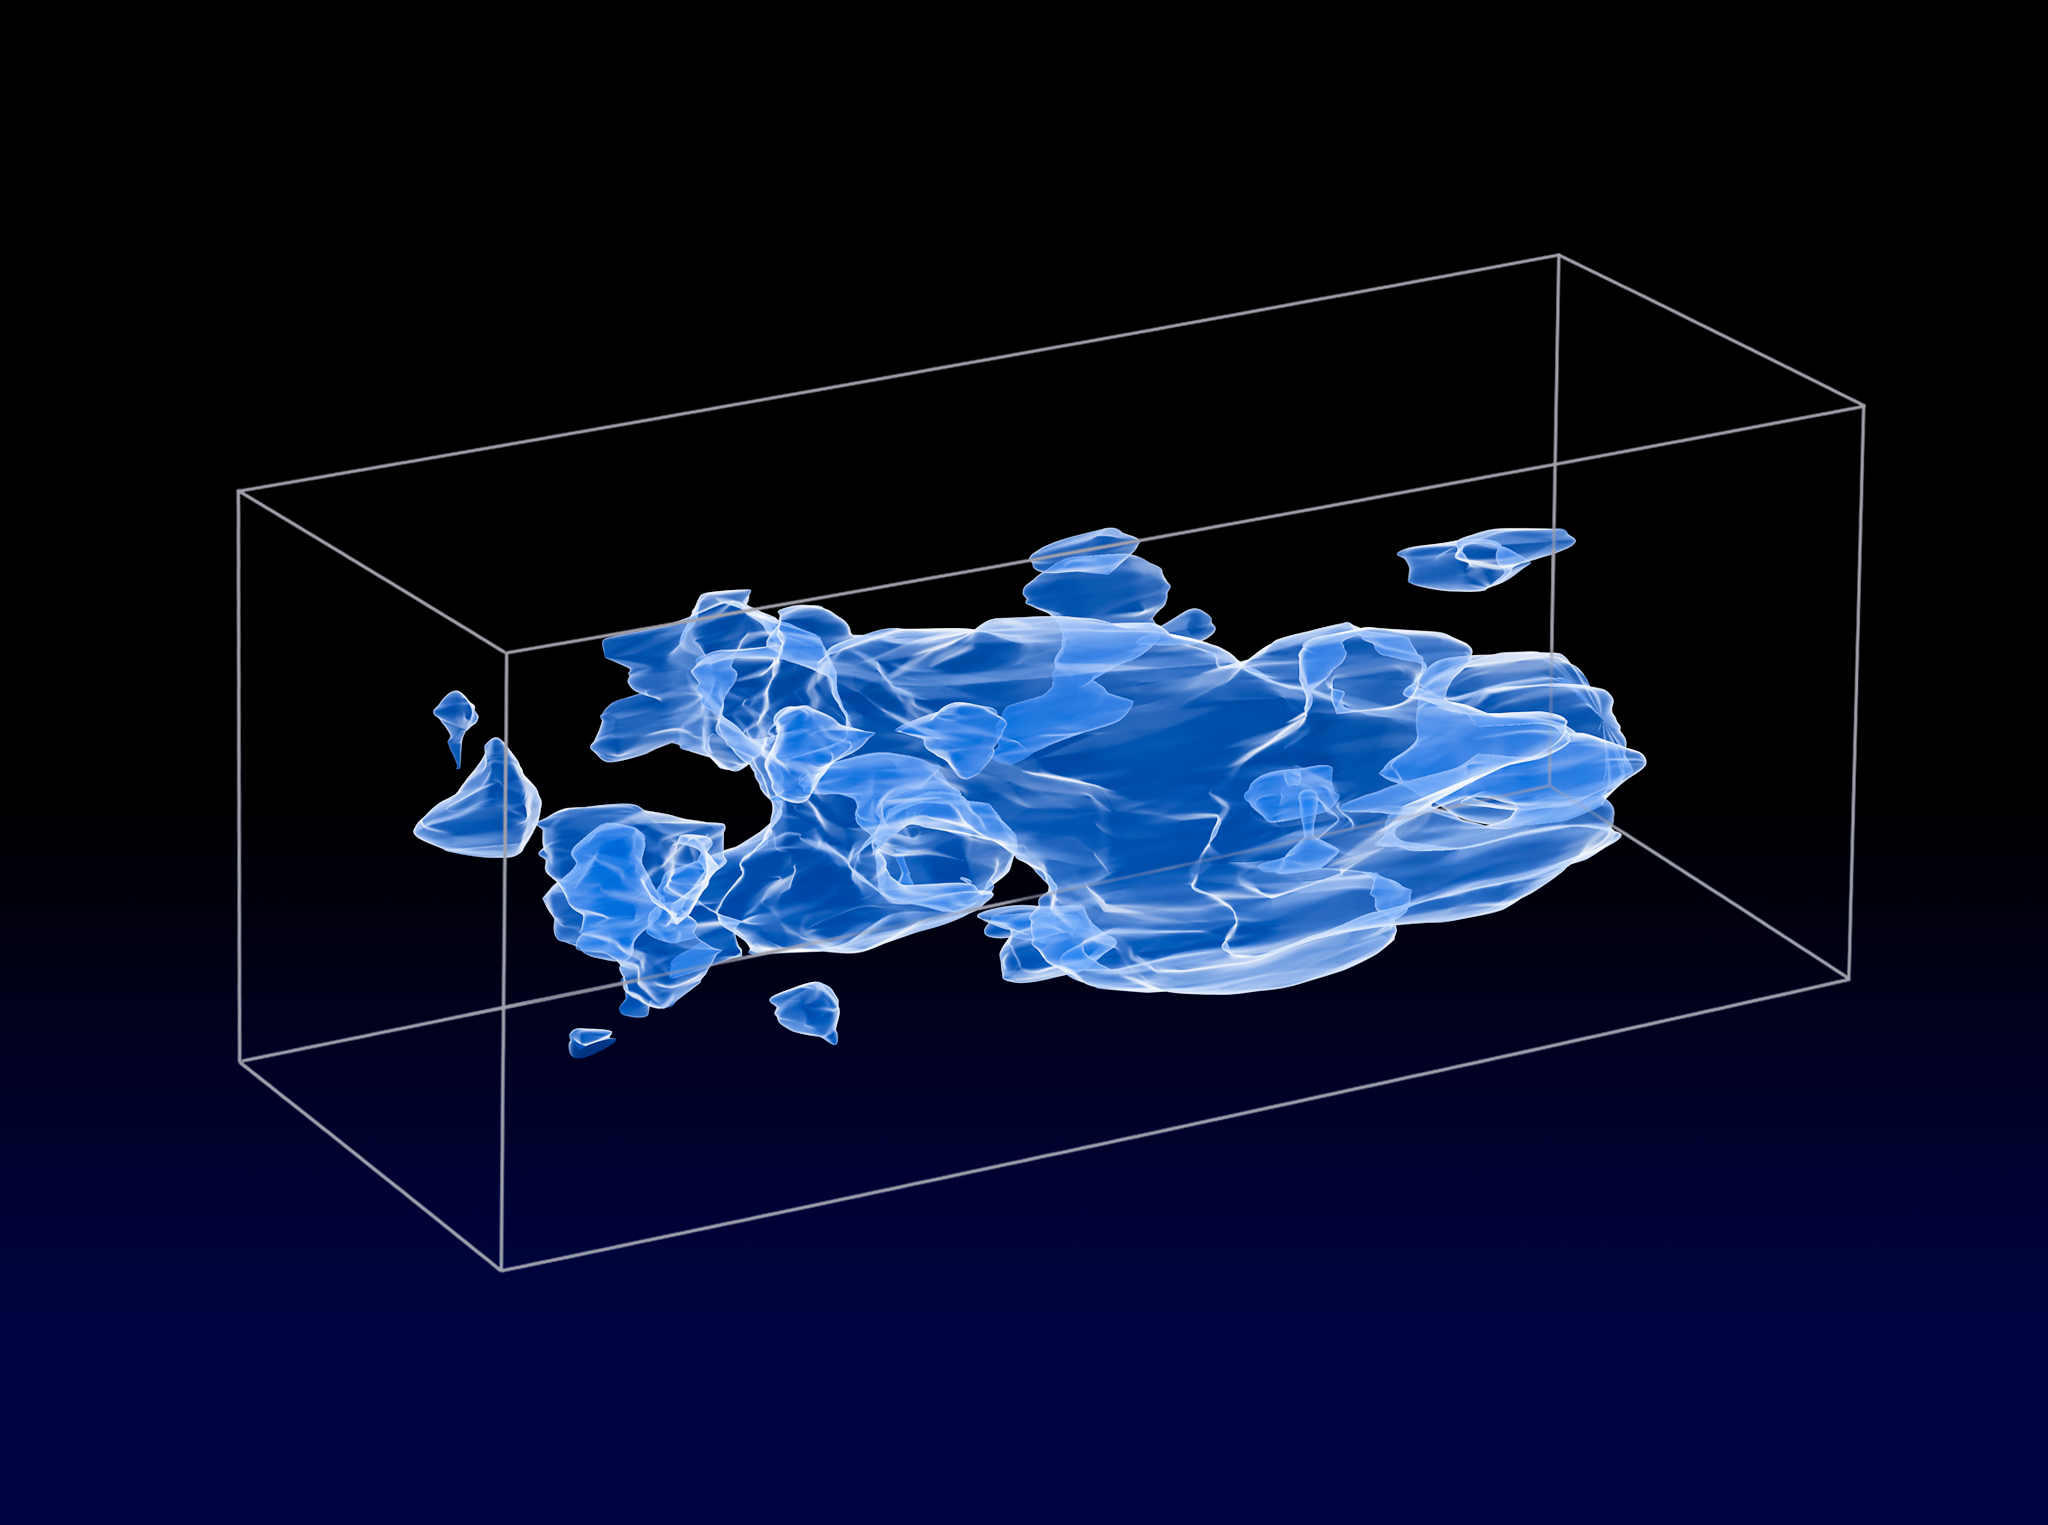

The COSMOS survey (artist's impression)

When the slices across the Universe and back into time are combined, they make a three-dimensional map of dark matter in the Universe. The three axes of the box correspond to sky position (in right ascension and declination), and distance from the Earth increasing from left to right (as measured by cosmological redshift). Note how the clumping of the dark matter becomes more pronounced, moving right to left across the volume map, from the early Universe to the more recent Universe.

Credit: NASA, ESA and R. Massey (California Institute of Technology)